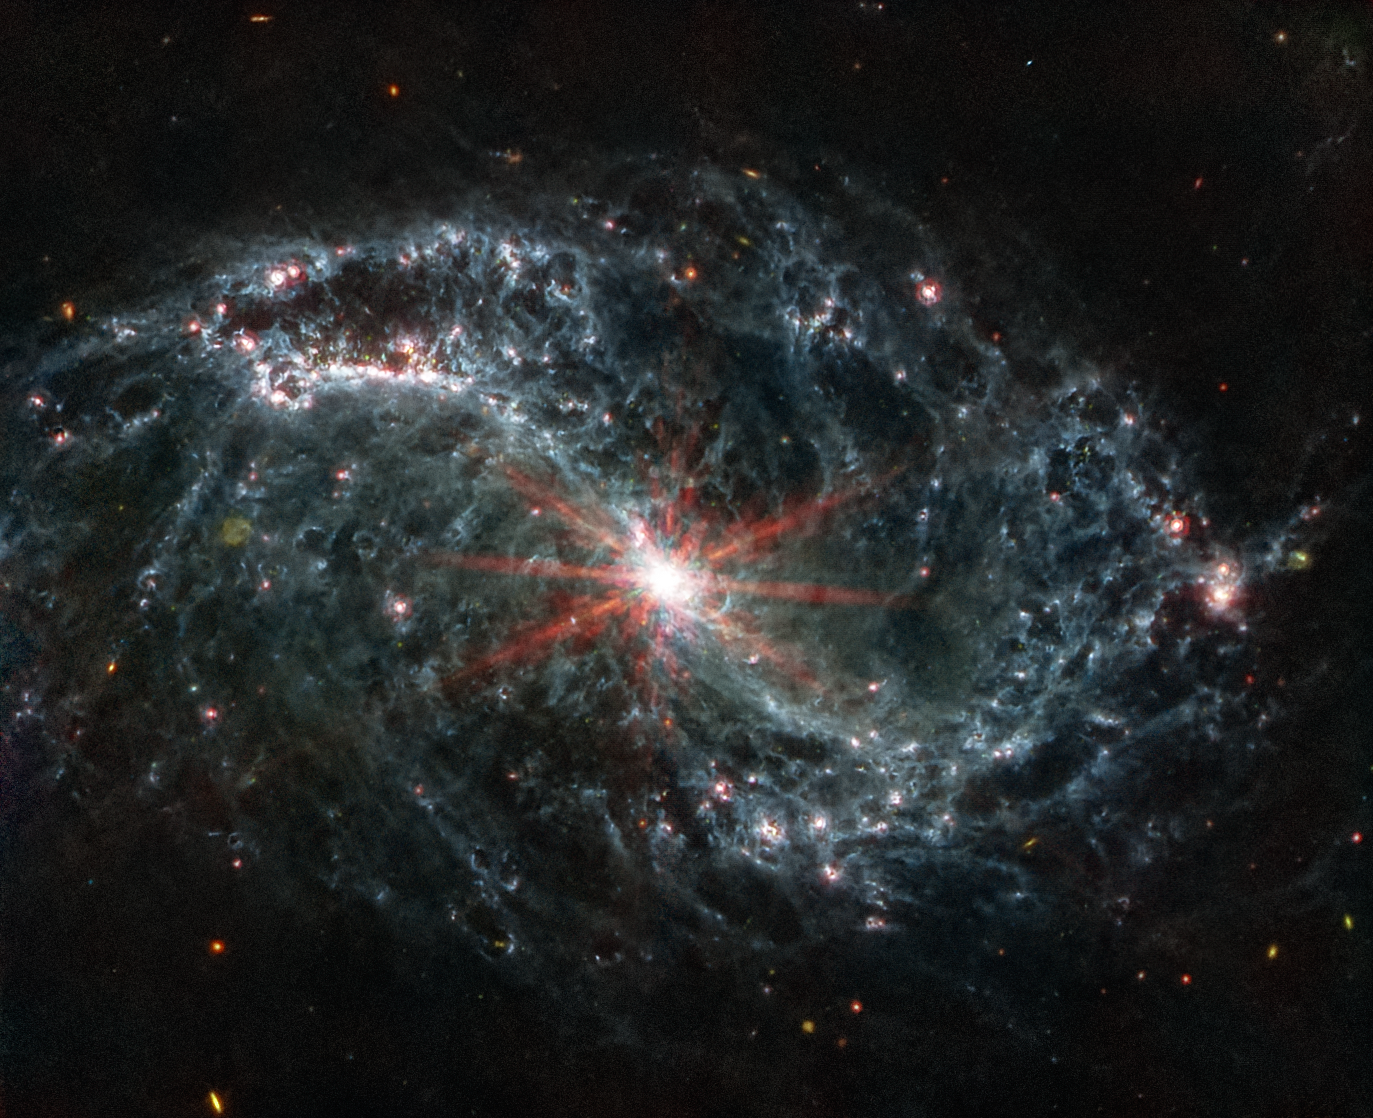

NGC 7496 (MIRI Image)

Scientists are getting their first look with the NASA/ESA/CSA James Webb Space Telescope’s powerful resolution at how the formation of young stars influences the evolution of nearby galaxies. The spiral arms of NGC 7496, one of a total of 19 galaxies targeted for study by the Physics at High Angular resolution in Nearby Galaxies (PHANGS) collaboration, are filled with cavernous bubbles and shells overlapping one another in this image from Webb’s Mid-Infrared Instrument (MIRI). These filaments and hollow cavities are evidence of young stars releasing energy and, in some cases, blowing out the gas and dust of the interstellar medium they plough into.

Until Webb’s high resolution at infrared wavelengths came along, stars at the earliest point of their lifecycle in nearby galaxies like NGC 7496 remained obscured by gas and dust. Webb’s specific wavelength coverage (7.7 and 11.3 microns), allows for the detection of polycyclic aromatic hydrocarbons, which play a critical role in the formation of stars and planets. In Webb’s MIRI image, these are mostly found within the main dust lanes in the spiral arms.

In their analysis of the new data from Webb, scientists were able to identify nearly 60 new, undiscovered embedded cluster candidates in NGC 7496. These newly identified clusters could be among the youngest stars in the entire galaxy.

At the centre of NGC 7496, a barred spiral galaxy, is an active galactic nucleus (AGN). An AGN is a supermassive black hole that is emitting jets and winds. The AGN glows brightly at the centre of this Webb image. Additionally, Webb’s extreme sensitivity also picks up various background galaxies,far distant from NGC 7496, which appear green or red in some instances.

NGC 7496 lies over 24 million light-years away from Earth in the constellation Grus.
In this image of NGC 7496, blue, green, and red were assigned to Webb’s MIRI data at 7.7, 10 and 11.3, and 21 microns (the F770W, F1000W and F1130W, and F2100W filters, respectively).

MIRI was contributed by ESA and NASA, with the instrument designed and built by a consortium of nationally funded European Institutes (The MIRI European Consortium) and NASA’s Jet Propulsion Laboratory, in partnership with the University of Arizona.

Credit: NASA, ESA, CSA, and J. Lee (NOIRLab), A. Pagan (STScI)